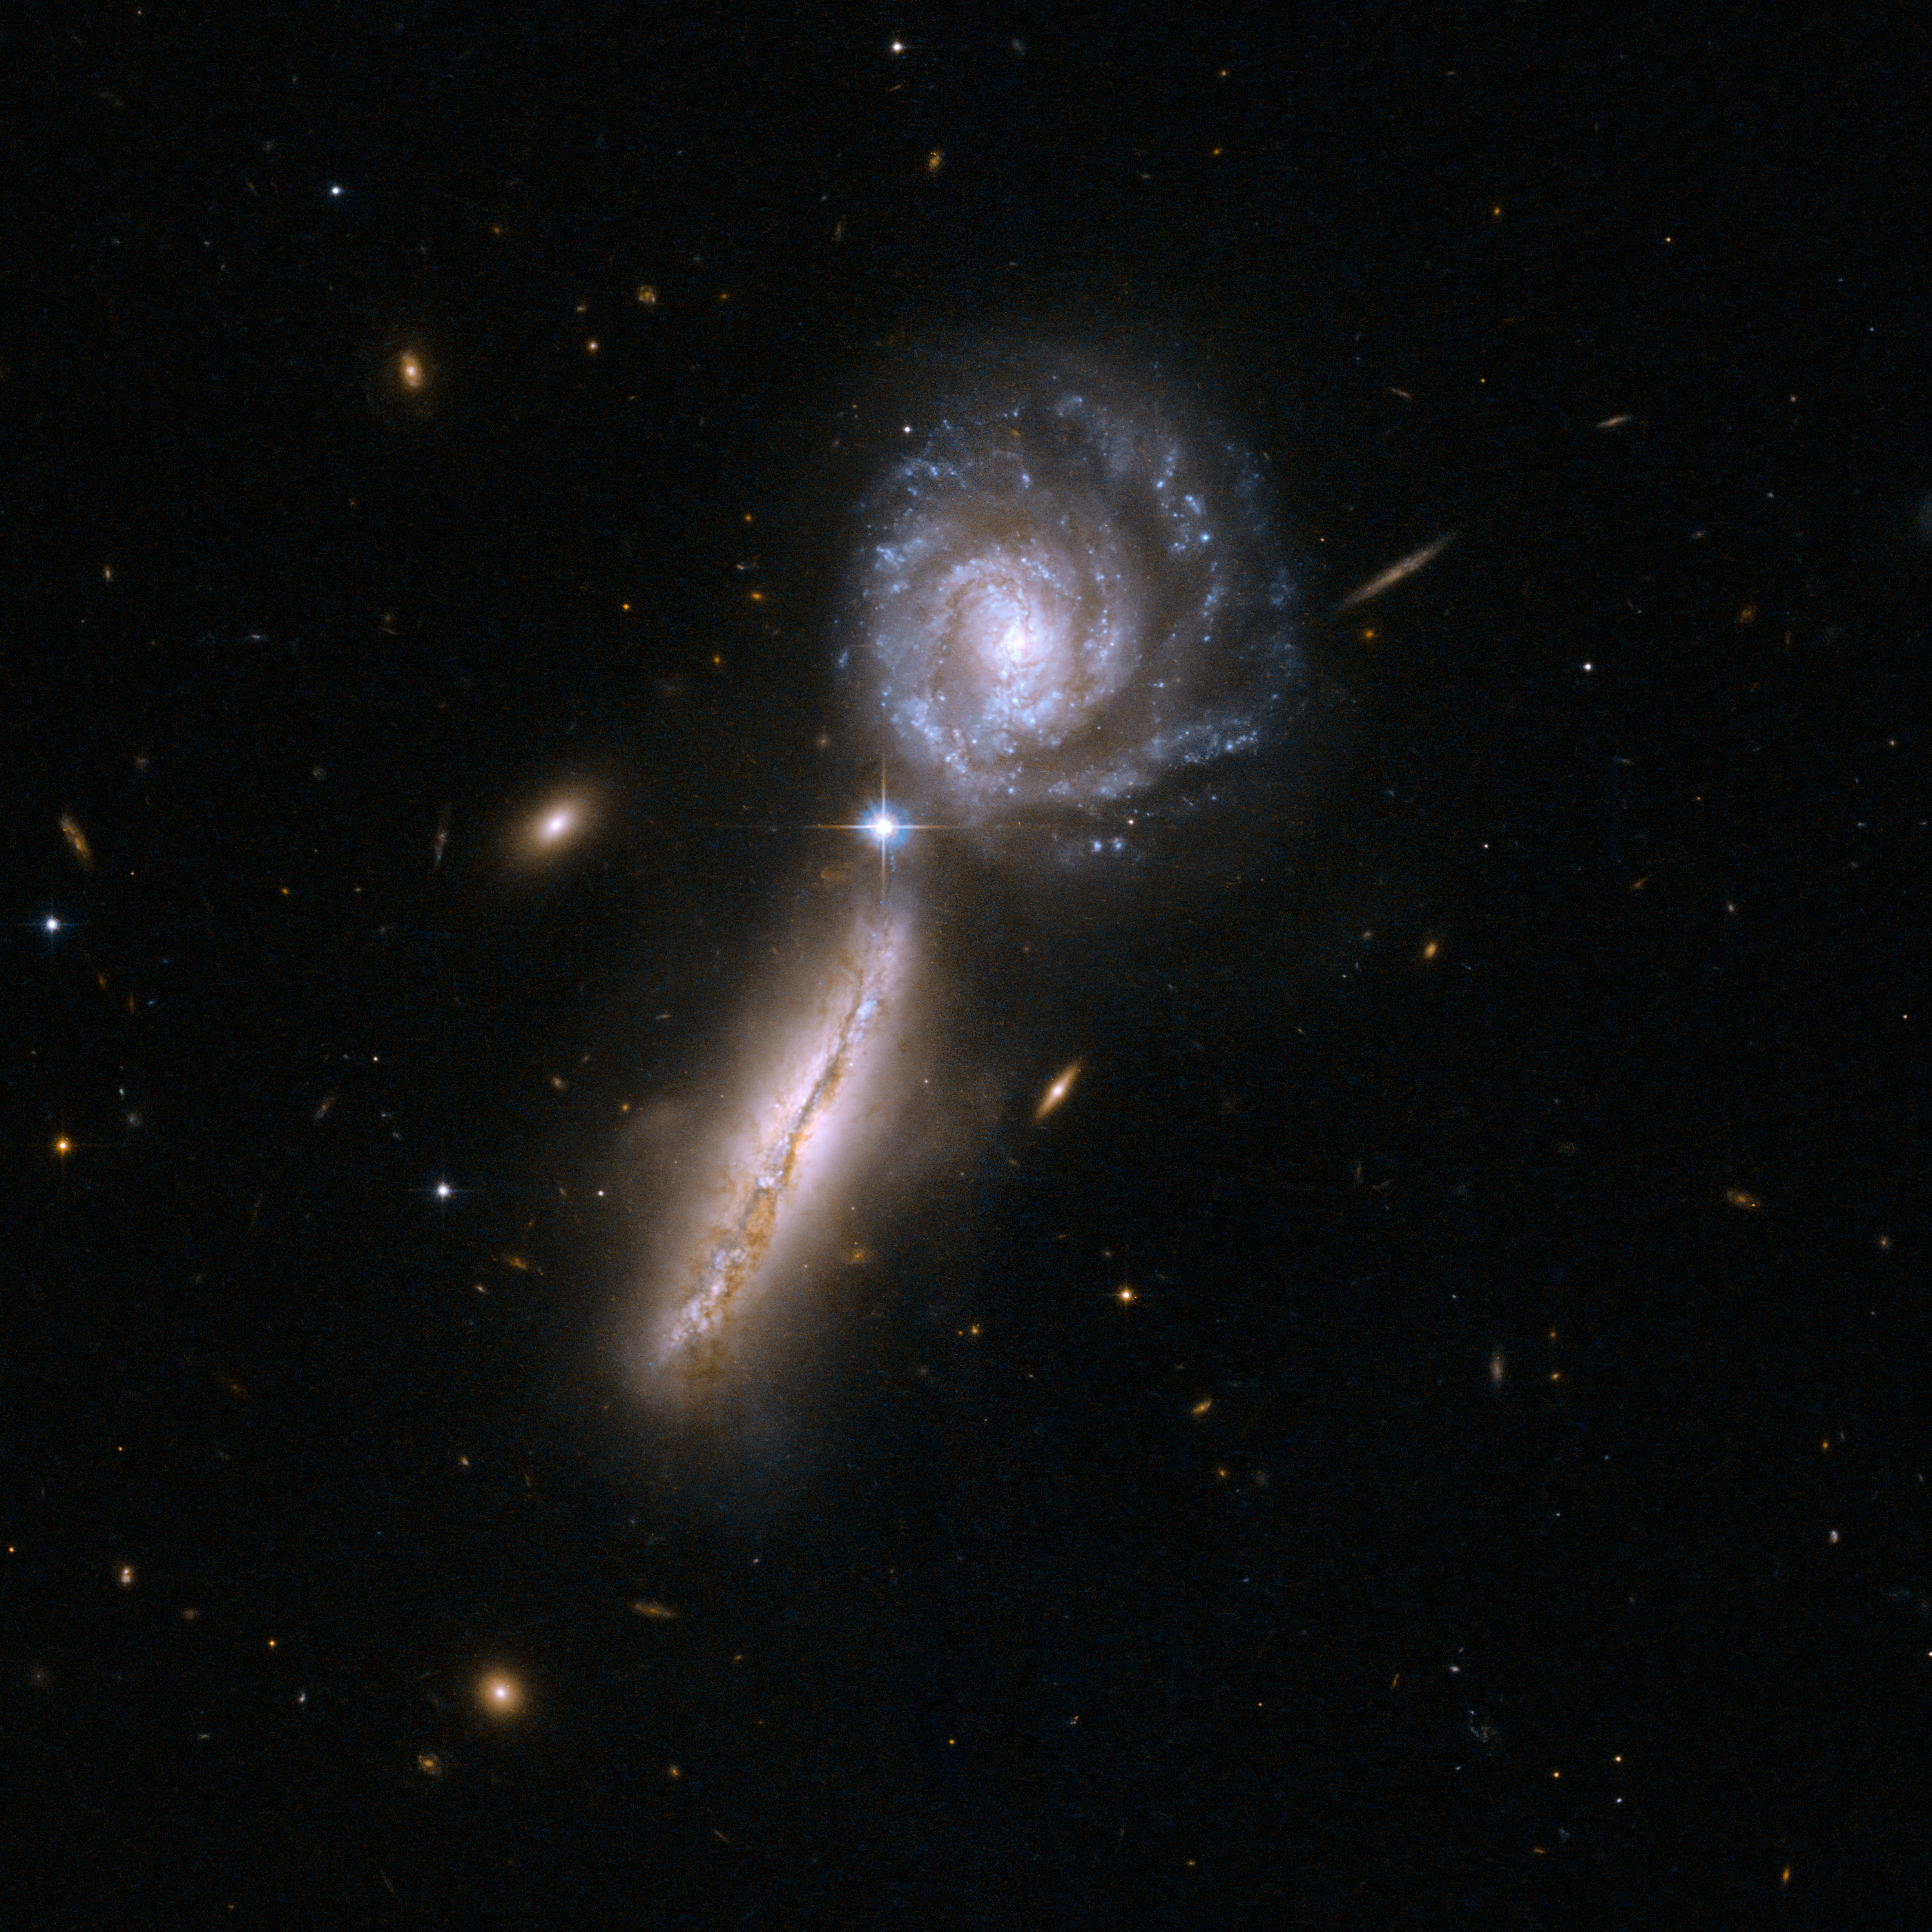

UGC 9618

Arp 302 consists of a pair of very gas-rich spiral galaxies in their early stages of interaction: VV 340A is seen edge-on to the left, and VV 340B face-on to the right. An enormous amount of infrared light is radiated by the gas from massive stars that are forming at a rate similar to the most vigorous giant star-forming regions in our own Milky Way. UGC 9618 is 450 million light-years away from Earth, and is the 302nd galaxy in Arp's Atlas of Peculiar Galaxies.

This image is part of a large collection of 59 images of merging galaxies taken by the Hubble Space Telescope and released on the occasion of its 18th anniversary on 24th April 2008.

Credit: NASA, ESA, the Hubble Heritage Team (STScI/AURA)-ESA/Hubble Collaboration and A. Evans (University of Virginia, Charlottesville/NRAO/Stony Brook University)